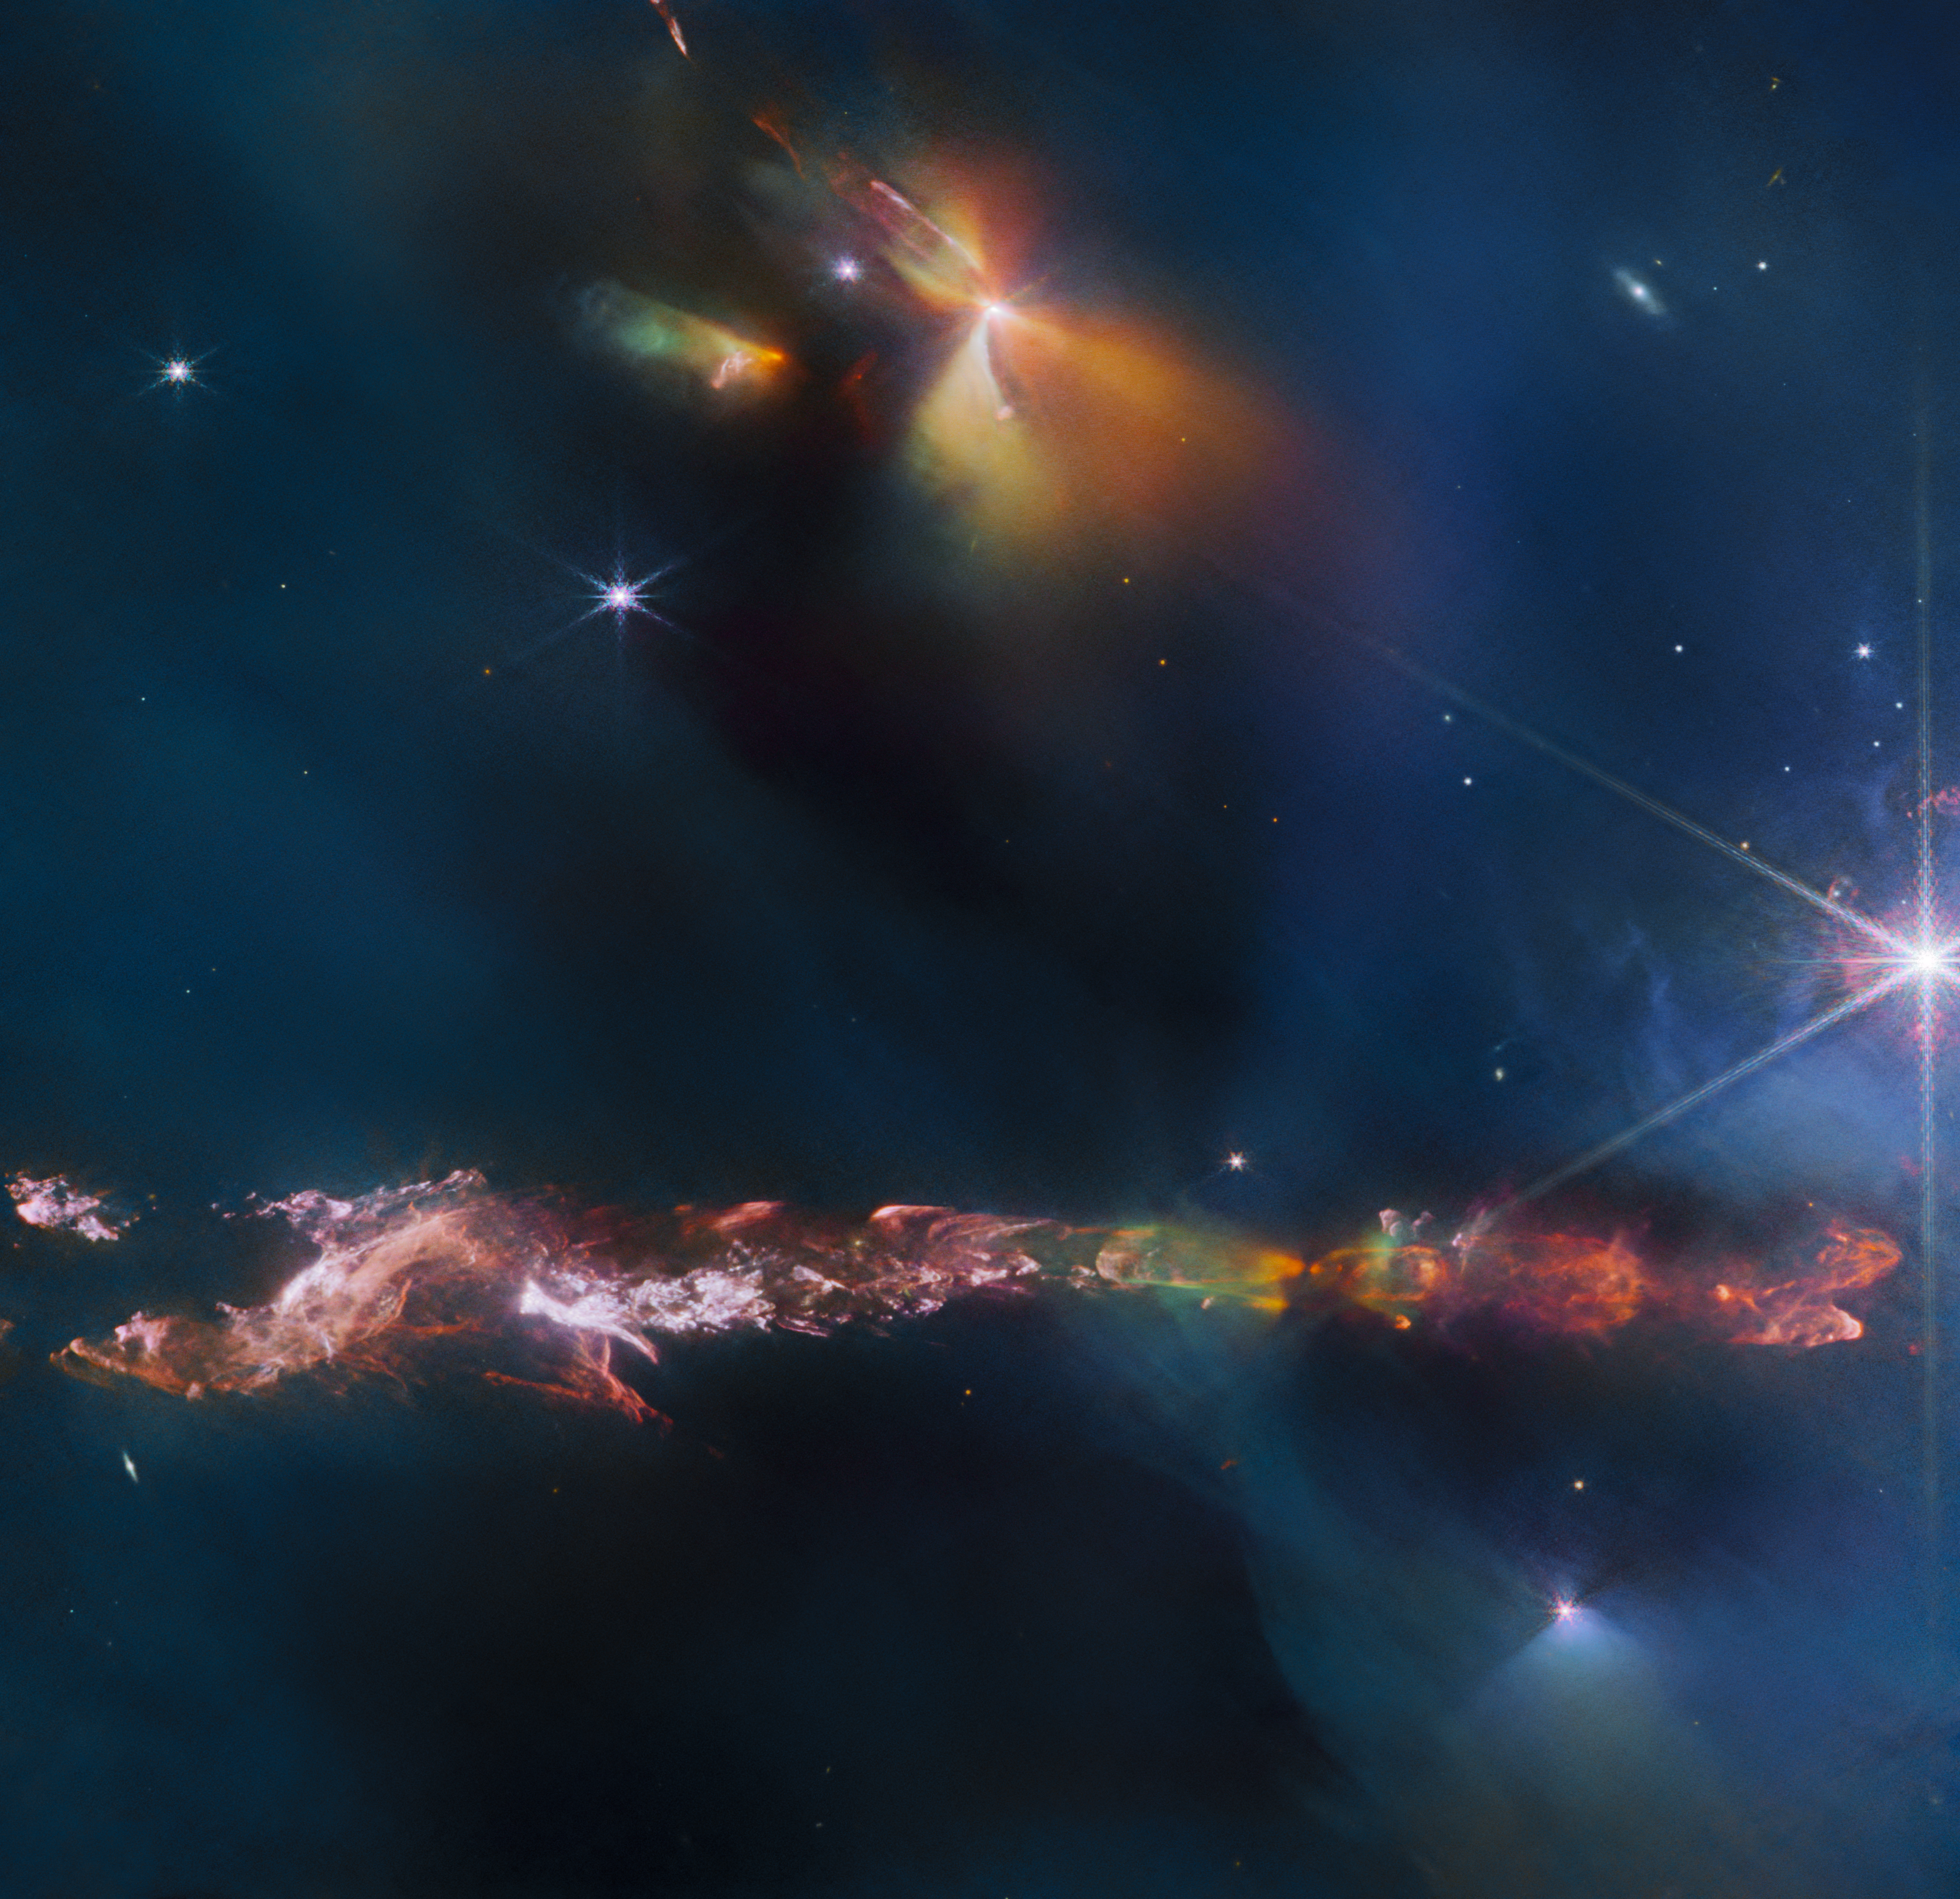

A prominent protostar in Perseus

This new Picture of the Month from the NASA/ESA/CSA James Webb Space Telescope reveals intricate details of the Herbig Haro object number 797 (HH 797). Herbig-Haro objects are luminous regions surrounding newborn stars (known as protostars), and are formed when stellar winds or jets of gas spewing from these newborn stars form shockwaves colliding with nearby gas and dust at high speeds. HH 797, which dominates the lower half of this image, is located close to the young open star cluster IC 348, near the eastern edge of the Perseus dark cloud complex. The bright infrared objects in the upper portion of the image are thought to host two further protostars.

This image was captured with Webb’s Near-InfraRed Camera (NIRCam). Infrared imaging is a powerful way to study newborn stars and their outflows, because the youngest stars are invariably still embedded within the gas and dust from which they are formed. The infrared emission of the star’s outflows penetrates the obscuring gas and dust, making Herbig-Haro objects ideal for observation with Webb’s sensitive infrared instruments. Molecules excited by the turbulent conditions, including molecular hydrogen and carbon monoxide, emit infrared light that Webb can collect to visualise the structure of the outflows. NIRCam is particularly good at observing the hot (thousands of degree Celsius) molecules that are excited as a result of shocks.

Using ground-based observations, researchers have previously found that for cold molecular gas associated with HH 797, most of the red-shifted gas (moving away from us) is found to the south (bottom right), while the blue-shifted gas (moving towards us) is to the north (bottom left). A gradient was also found across the outflow, such that at a given distance from the young central star, the velocity of the gas near the eastern edge of the jet is more red-shifted than that of the gas on the western edge. Astronomers in the past thought this was due to the outflow’s rotation. In this higher resolution Webb image, however, we can see that what was thought to be one outflow is in fact made up of two almost parallel outflows with their own separate series of shocks (which explains the velocity asymmetries). The source, located in the small dark region (bottom right of centre), and already known from previous observations, is therefore not a single but a double star. Each star is producing its own dramatic outflow. Other outflows are also seen in this image, including one from the protostar in the top right of centre along with its illuminated cavity walls.

HH 797 resides directly north of HH 211 (separated by approximately 30 arcseconds), which was the feature of a Webb image release in September 2023.

Credit: ESA/Webb, NASA & CSA, T. Ray (Dublin Institute for Advanced Studies)